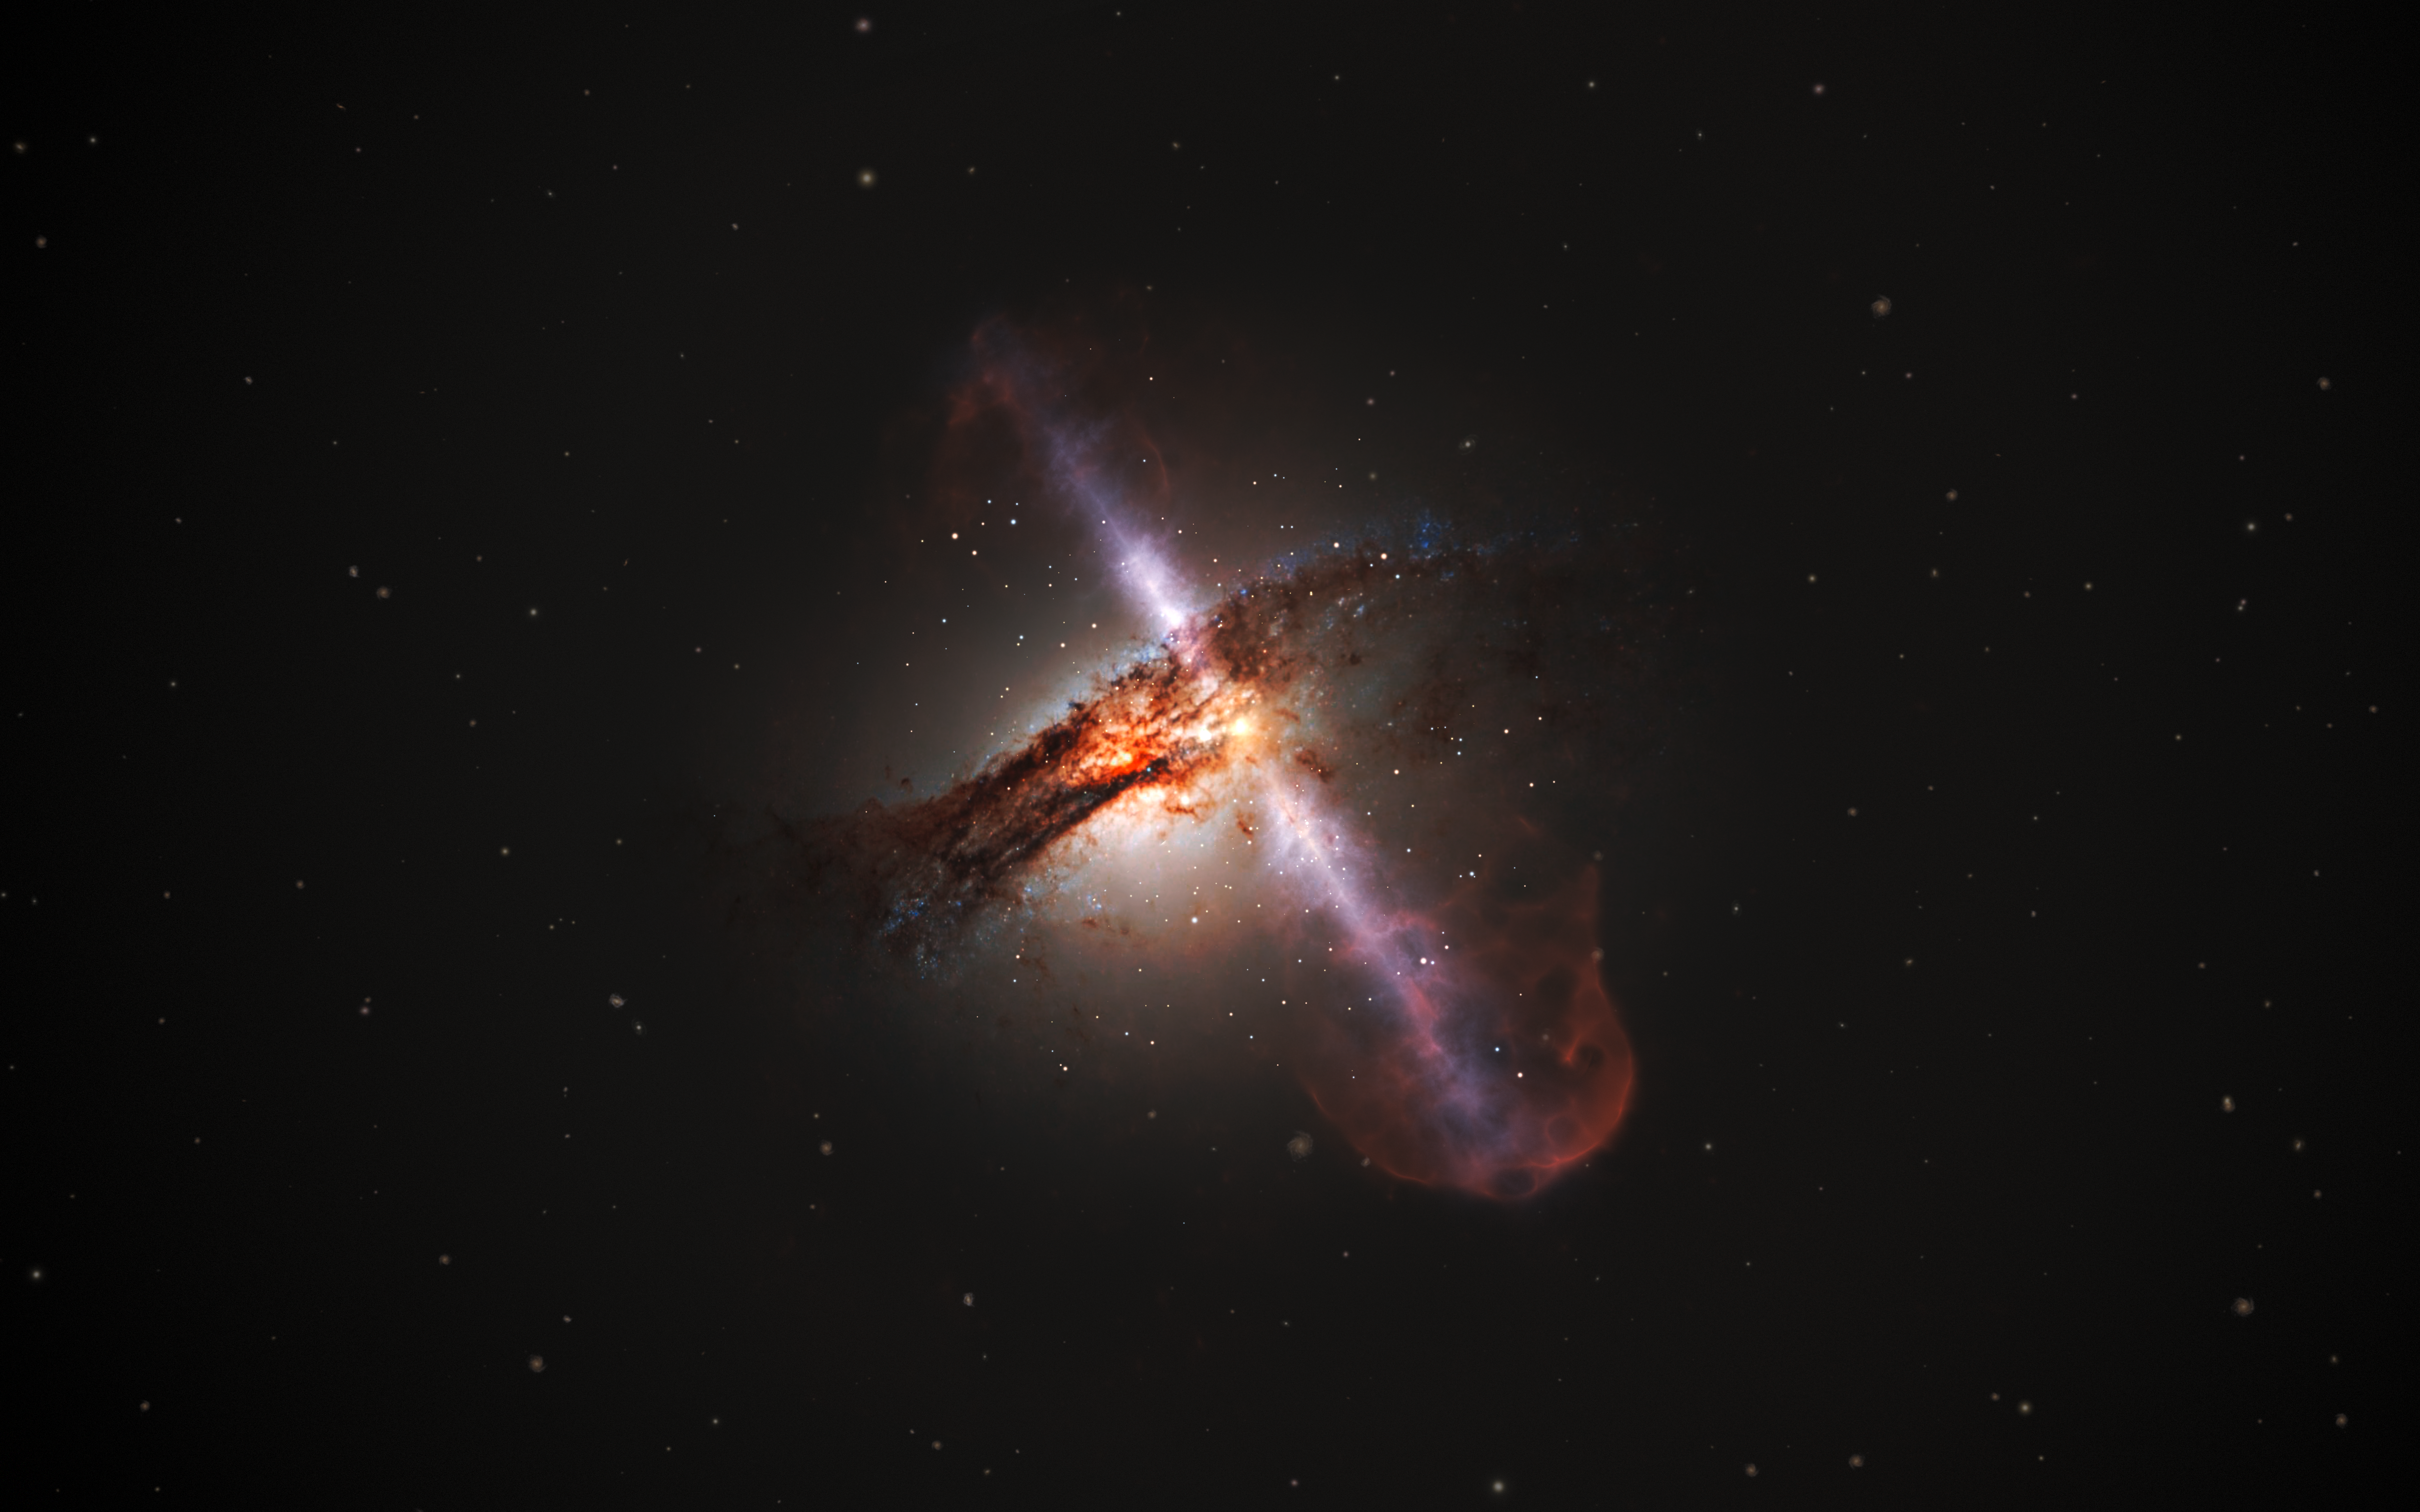

Artist’s illustration of galaxy with jets from a supermassive black hole

This artist’s impression illustrates how high-speed jets from supermassive black holes would look. These outflows of plasma are the result of the extraction of energy from a supermassive black hole’s rotation as it consumes the disc of swirling material that surrounds it. These jets have very strong emissions at radio wavelengths.

Credit: ESA/Hubble, L. Calçada (ESO)